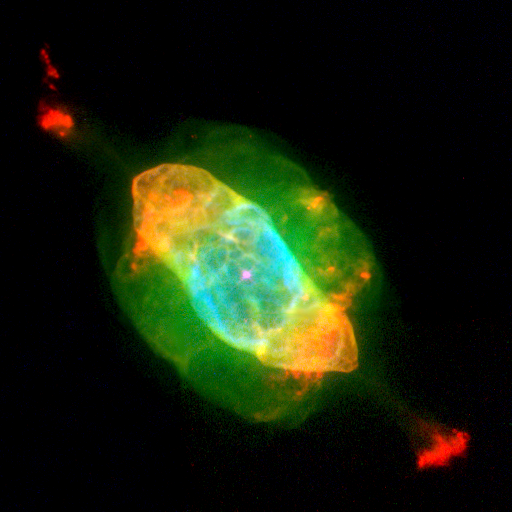

Hubble's Planetary Nebula Gallery. A View of NGC 7009

NGC 7009 has a bright central star at the centre of a dark cavity bounded by a football-shaped rim of dense, blue and red gas. The cavity and its rim are trapped inside smoothly-distributed greenish material in the shape of a barrel and comprised of the star's former outer layers. At larger distances, and lying along the long axis of the nebula, a pair of red 'ansae', or 'handles' appears. Each ansa is joined to the tips of the cavity by a long greenish jet of material. The handles are clouds of low-density gas. NGC 7009 is 1, 400 light-years away in the constellation Aquarius. The Hubble telescope observation was taken April 28, 1996 by the Wide Field and Planetary Camera 2.

Credit: Bruce Balick (University of Washington), Jason Alexander (University of Washington), Arsen Hajian (U.S. Naval Observatory), Yervant Terzian (Cornell University), Mario Perinotto (University of Florence, Italy), Patrizio Patriarchi (Arcetri Observatory, Italy), NASA/ESA